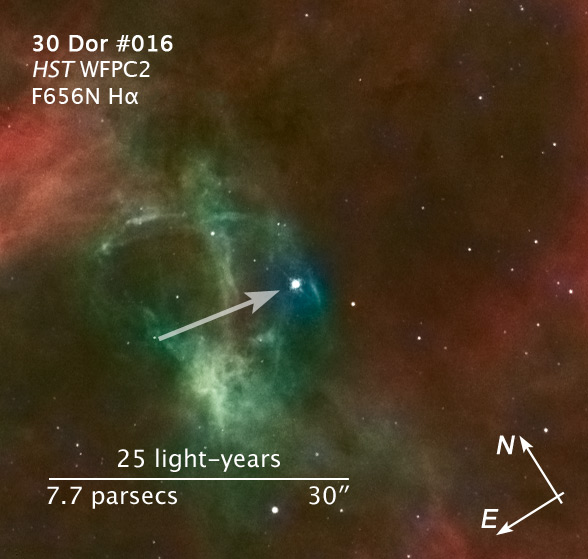

Compass and scale image of 30 Doradus runaway star

The young star, only one million to two million years old, may have travelled about 375 light-years from its suspected home in star cluster R136.

Credit: NASA, ESA and Z. Levay (STScI) Science Credit: NASA, ESA, C. Evans (Royal Observatory Edinburgh), N. Walborn (STScI) and ESO